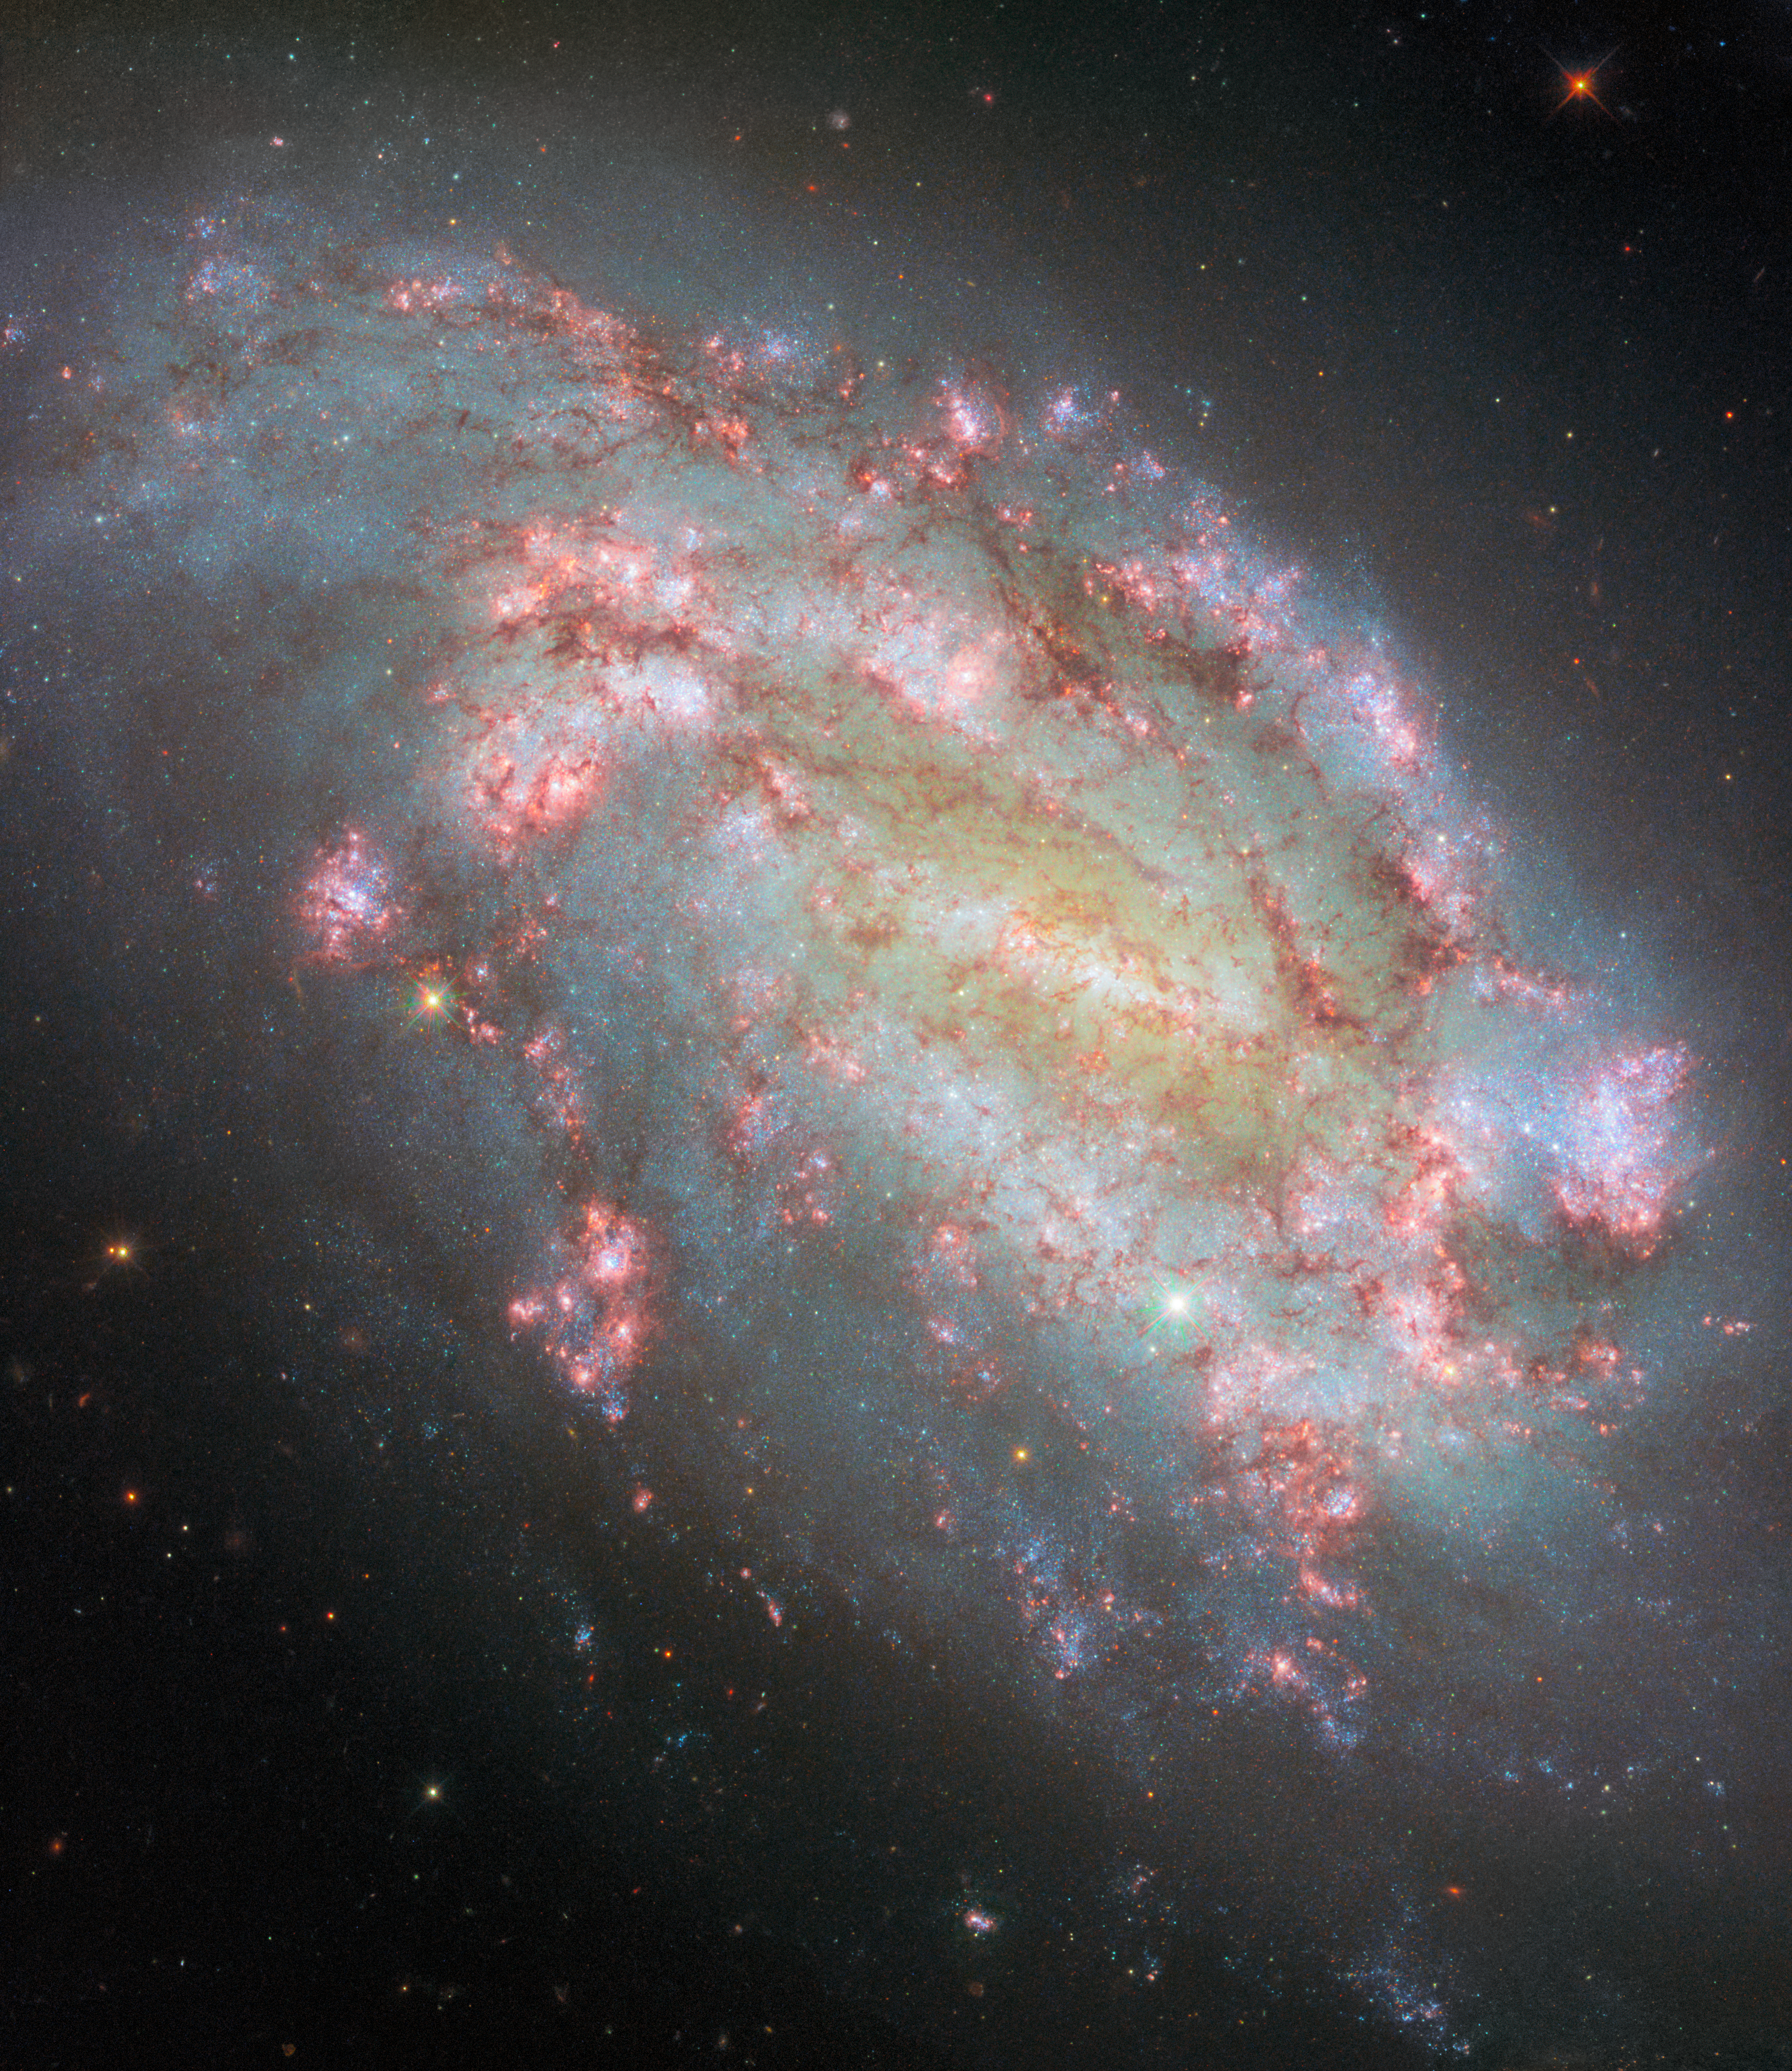

The light of knowledge

The magnificent galaxy featured in this Hubble Picture of the Week is NGC 1559. It is a barred spiral galaxy located in the constellation Reticulum near the Large Magellanic Cloud, but much more distant at approximately 35 million light-years from Earth. Hubble last visited this object in 2018. The brilliant light captured in this image offers a wealth of information, which thanks to Hubble can be put to use by both scientists and the public.

This picture is composed of a whopping ten different images taken by the Hubble Space Telescope, each filtered to collect light from a specific wavelength or range of wavelengths. It spans Hubble’s sensitivity to light, from ultraviolet around 275 nanometres through blue, green and red to near-infrared at 1600 nanometres. This allows information about many different astrophysical processes in the galaxy to be recorded: a notable example is the red 656-nanometre filter used here. Hydrogen atoms which get ionised can emit light at this particular wavelength, called H-alpha emission. New stars forming in a molecular cloud, made mostly of hydrogen gas, emit copious amounts of ultraviolet light which is absorbed by the cloud, but which ionises it and causes it to glow with this H-alpha light. Therefore, filtering to detect only this light provides a reliable means to detect areas of star formation (called H II regions), shown in this image by the bright red and pink colours of the blossoming patches filling NGC 1559’s spiral arms.

These ten images come from six different observing programmes with Hubble, running from 2009 all the way up to the present year. These programmes were led by teams of astronomers from around the world with a variety of scientific goals, ranging from studying ionised gas and star formation, to following up on a supernova, to tracking variable stars as a contribution to calculating the Hubble constant. The data from all of these observations live on in the Hubble archive, available for anyone to use — not only for new science, but also to create spectacular images like this one! This image of NGC 1559, then, is a reminder of the incredible opportunities that the Hubble Space Telescope has provided and continues to provide.

Besides Hubble’s observations, astronomers are using the NASA/ESA/CSA James Webb Space Telescope to research this galaxy in even greater depth. This Webb image from February showcases the galaxy in near- and mid-infrared light.

Credit: ESA/Hubble & NASA, F. Belfiore, W. Yuan, J. Lee and the PHANGS-HST Team, A. Riess, K. Takáts, D. de Martin & M. Zamani (ESA/Hubble)